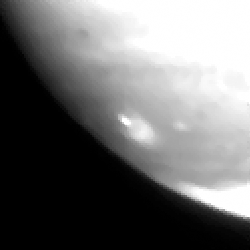

Fragment a impact site

This image shows the fragmnent A impact site.

Credit: Hubble Space Telescope Comet Team, and NASA/ESA